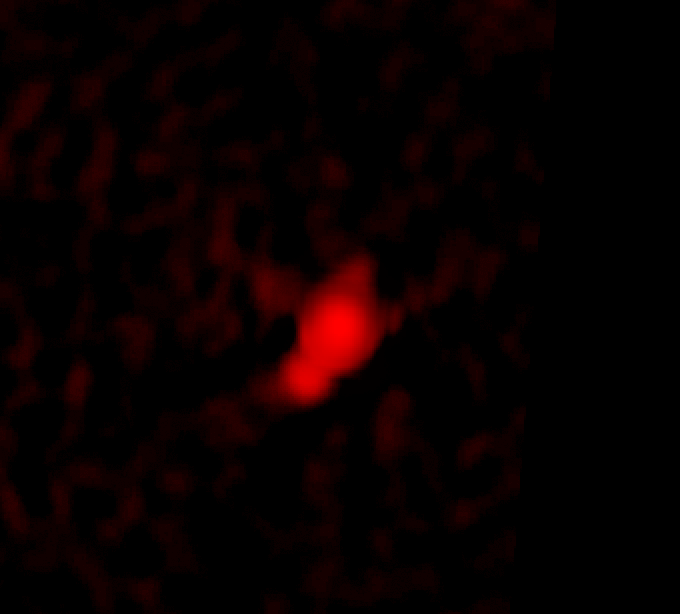

Galaxy C153 in Cluster Abell 2125 in Radio (VLA)

Trailing 200,000-light-year-long streamers of seething gas, a galaxy that was once like our Milky Way is being shredded as it plunges at 4.5 million miles per hour through the heart of a distant cluster of galaxies. In this unusually violent collision with ambient cluster gas, the galaxy is stripped down to its skeletal spiral arms as it is eviscerated of fresh hydrogen for making new stars.

Credit: F. Owen (NRAO)